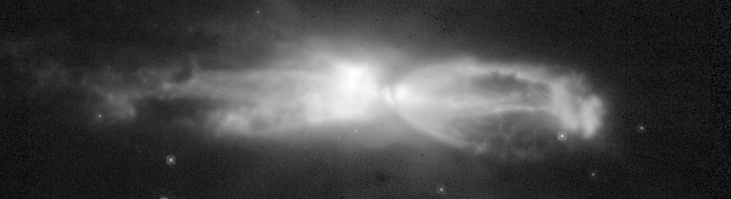

The 'Rotten Egg' Nebula - a planetary Nebula in the making

This black-and-white image was taken with one NICMOS infrared filter. That image is able to show more clearly the faint detail and structure in the nebula than can be achieved with the colour composites.

Credit: NASA, ESA, William B. Latter (SIRTF Science Center/California Institute of Technology), John H. Bieging (University of Arizona), Casey Meakin (University of Arizona), A.G.G.M. Tielens (Kapteyn Astronomical Institute), Aditya Dayal (IPAC/NASA Jet Propulsion Laboratory), Joseph L. Hora (Center for Astrophysics), and DouglasM. Kelly (University of Arizona)